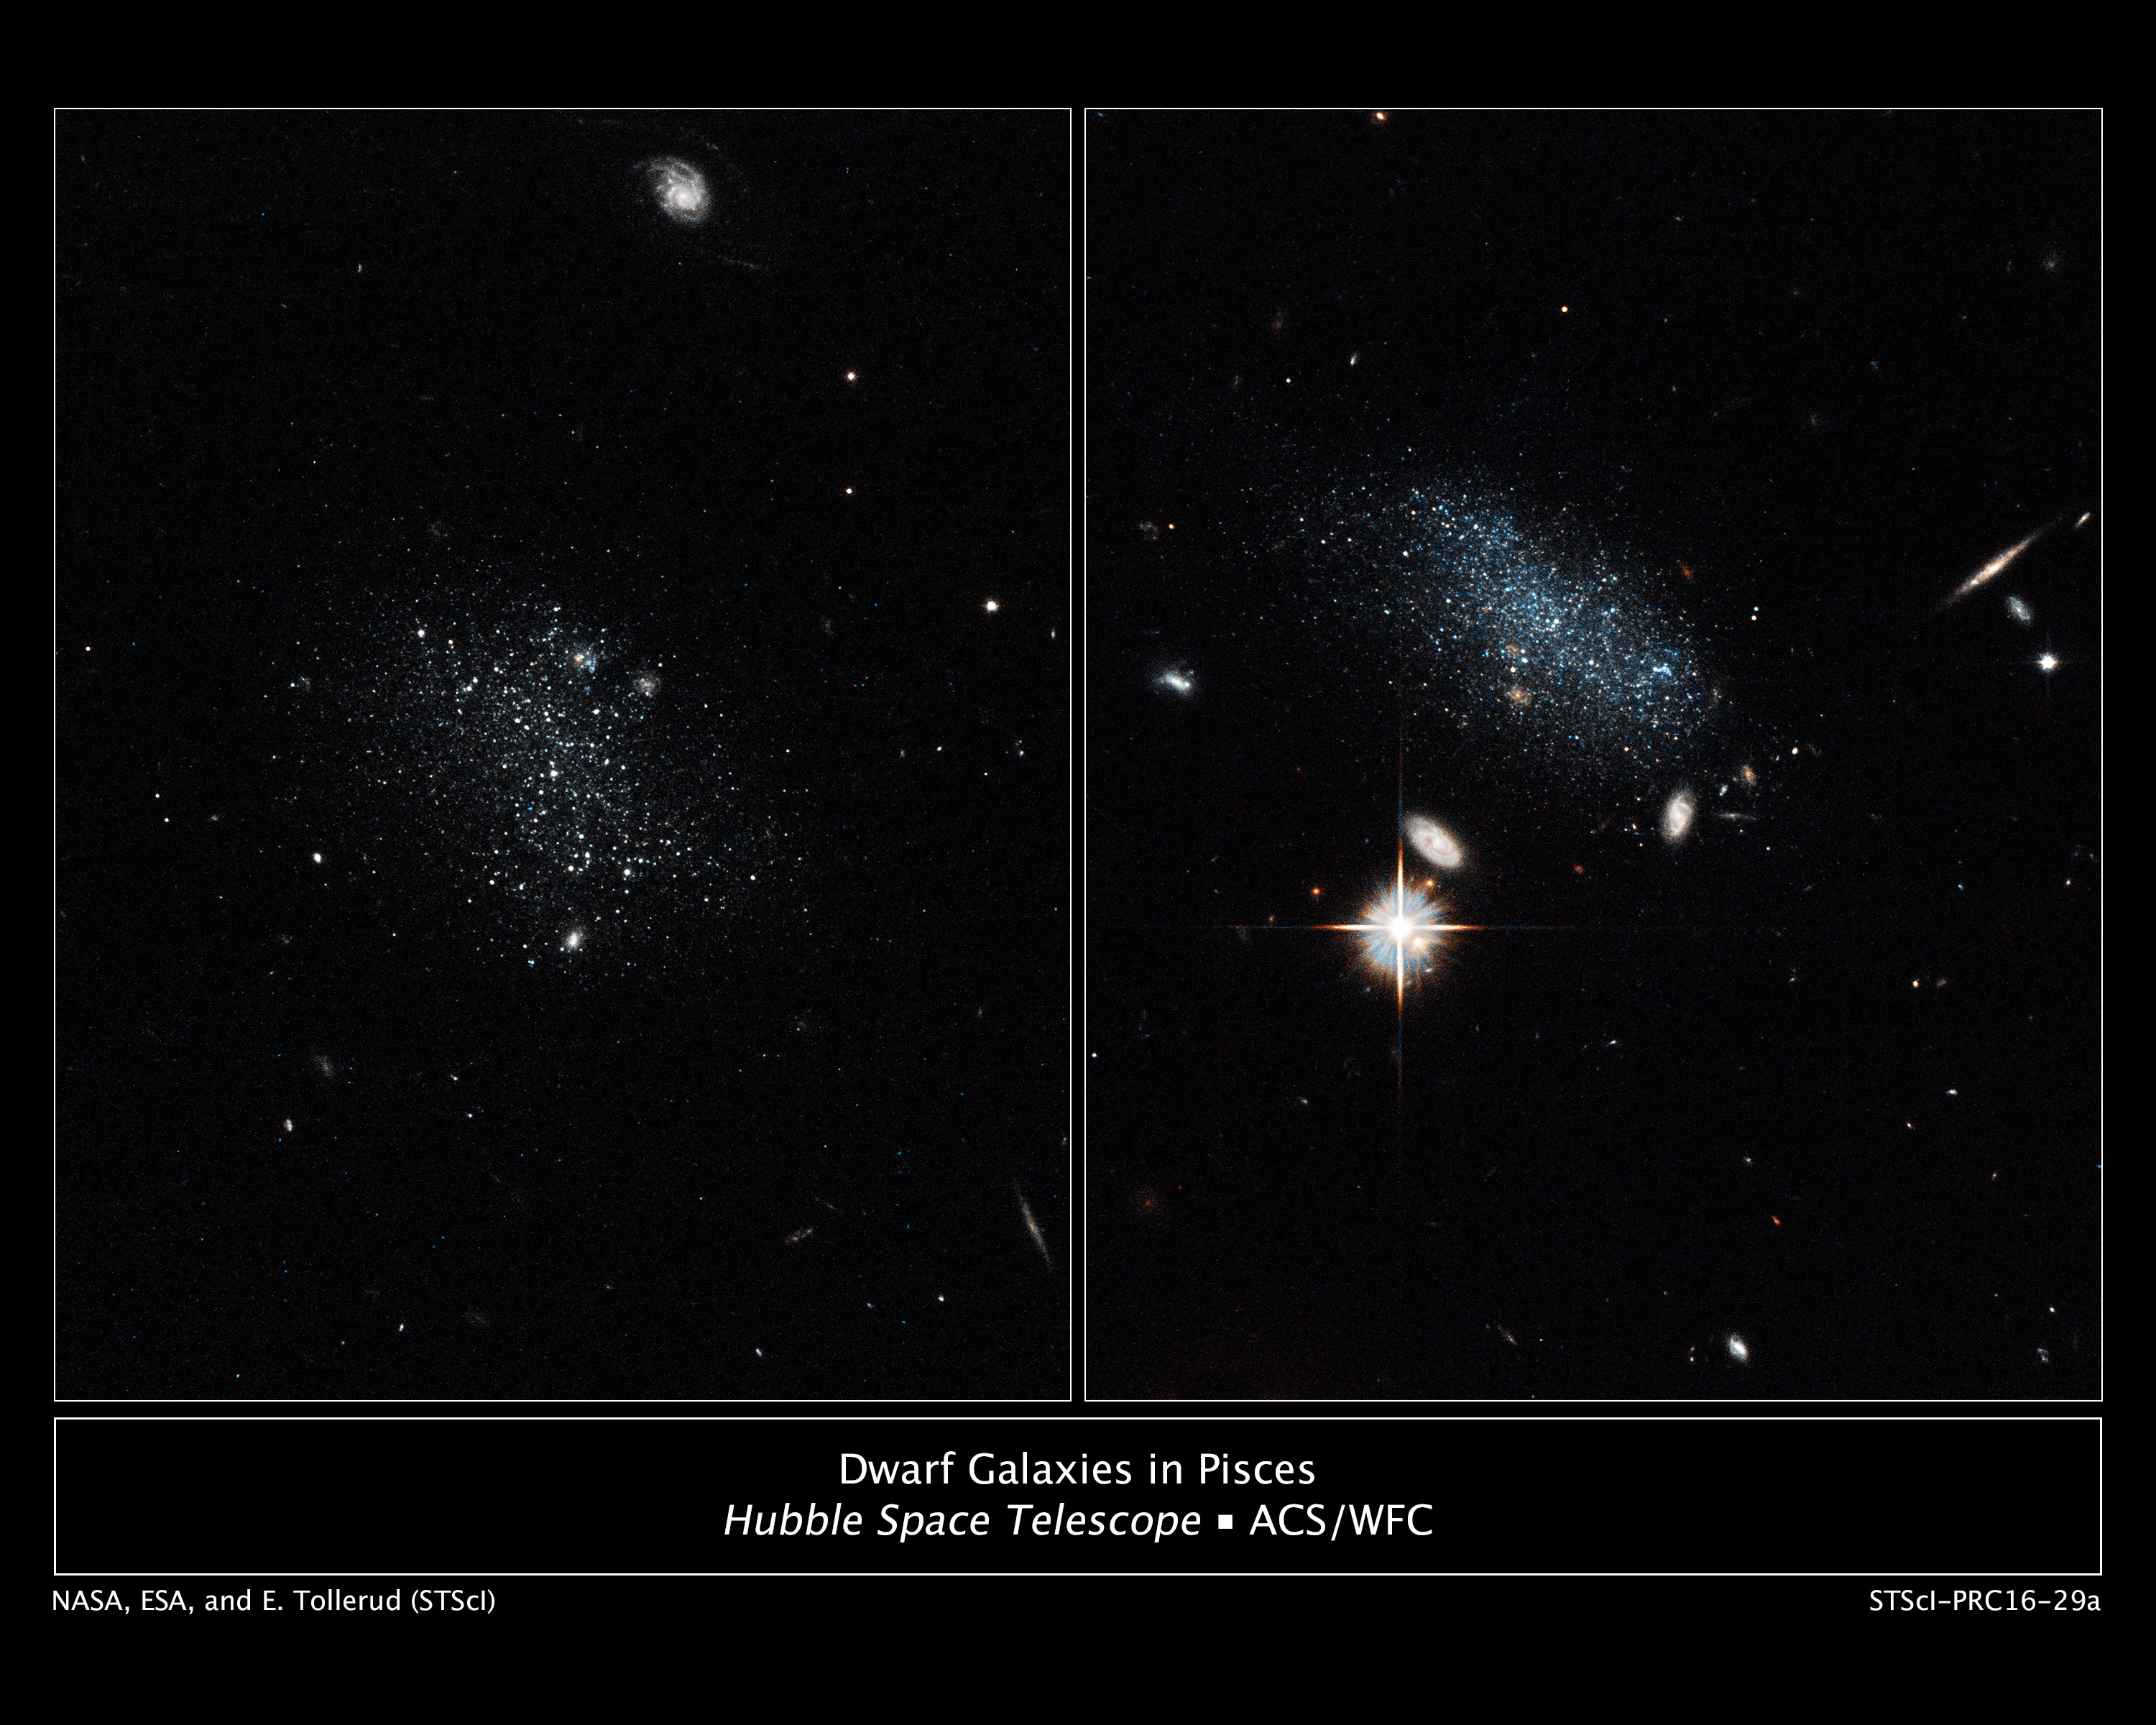

Dwarf galaxies in Pisces

The NASA/ESA Hubble Space Telescope has captured the glow of new stars in these small, ancient galaxies. Pisces A is on the left and Pisces B is on the right.

Astronomers estimate that less than 100 million years ago both galaxies doubled their star-formation rate. An analysis of the stars' colours reveals that the galaxies contain about 20 to 30 bright blue stars. The blue colour is a sign they are young, less than 100 million years old. Each galaxy contains about 10 million stars.

In the image of Pisces A, at left, the bright object at the top of the image is a distant background galaxy. Other distant background galaxies are visible as bright dots. In the image of Pisces B, at right, the bright object with the diffraction spikes below left of centre is a foreground star in our Milky Way galaxy. Several distant background galaxies are also visible.

Hubble observations suggest that Pisces A and Pisces B should have produced the bulk of their stars long ago. But the puny galaxies dwelled for billions of years in the Local Void, a region of the Universe sparsely populated with galaxies. Now the galaxies have moved into a region packed with galaxies and intergalactic gas. This dense environment is triggering star birth.

Pisces A is roughly 19 million light-years away and Pisces B about 30 million light-years away.

The image of Pisces A was taken on 30 October, 2014, by Hubble's Advanced Camera for Surveys. The image of Pisces B was taken on 8 November, 2014, by Hubble's Advanced Camera for Surveys.

The science team consists of Erik J. Tollerud, Space Telescope Science Institute (STScI), Baltimore, Maryland; Marla C. Geha, Yale University, New Haven, Connecticut; Jana Grcevich, American Museum of Natural History, New York, New York; Mary E. Putman, Columbia University, New York, New York; Daniel R. Weisz, University of Washington, Seattle; and Andrew E. Dolphin, Raytheon Co., Tucson, Arizona.

Credit: NASA, ESA, and E. Tollerud (STScI)